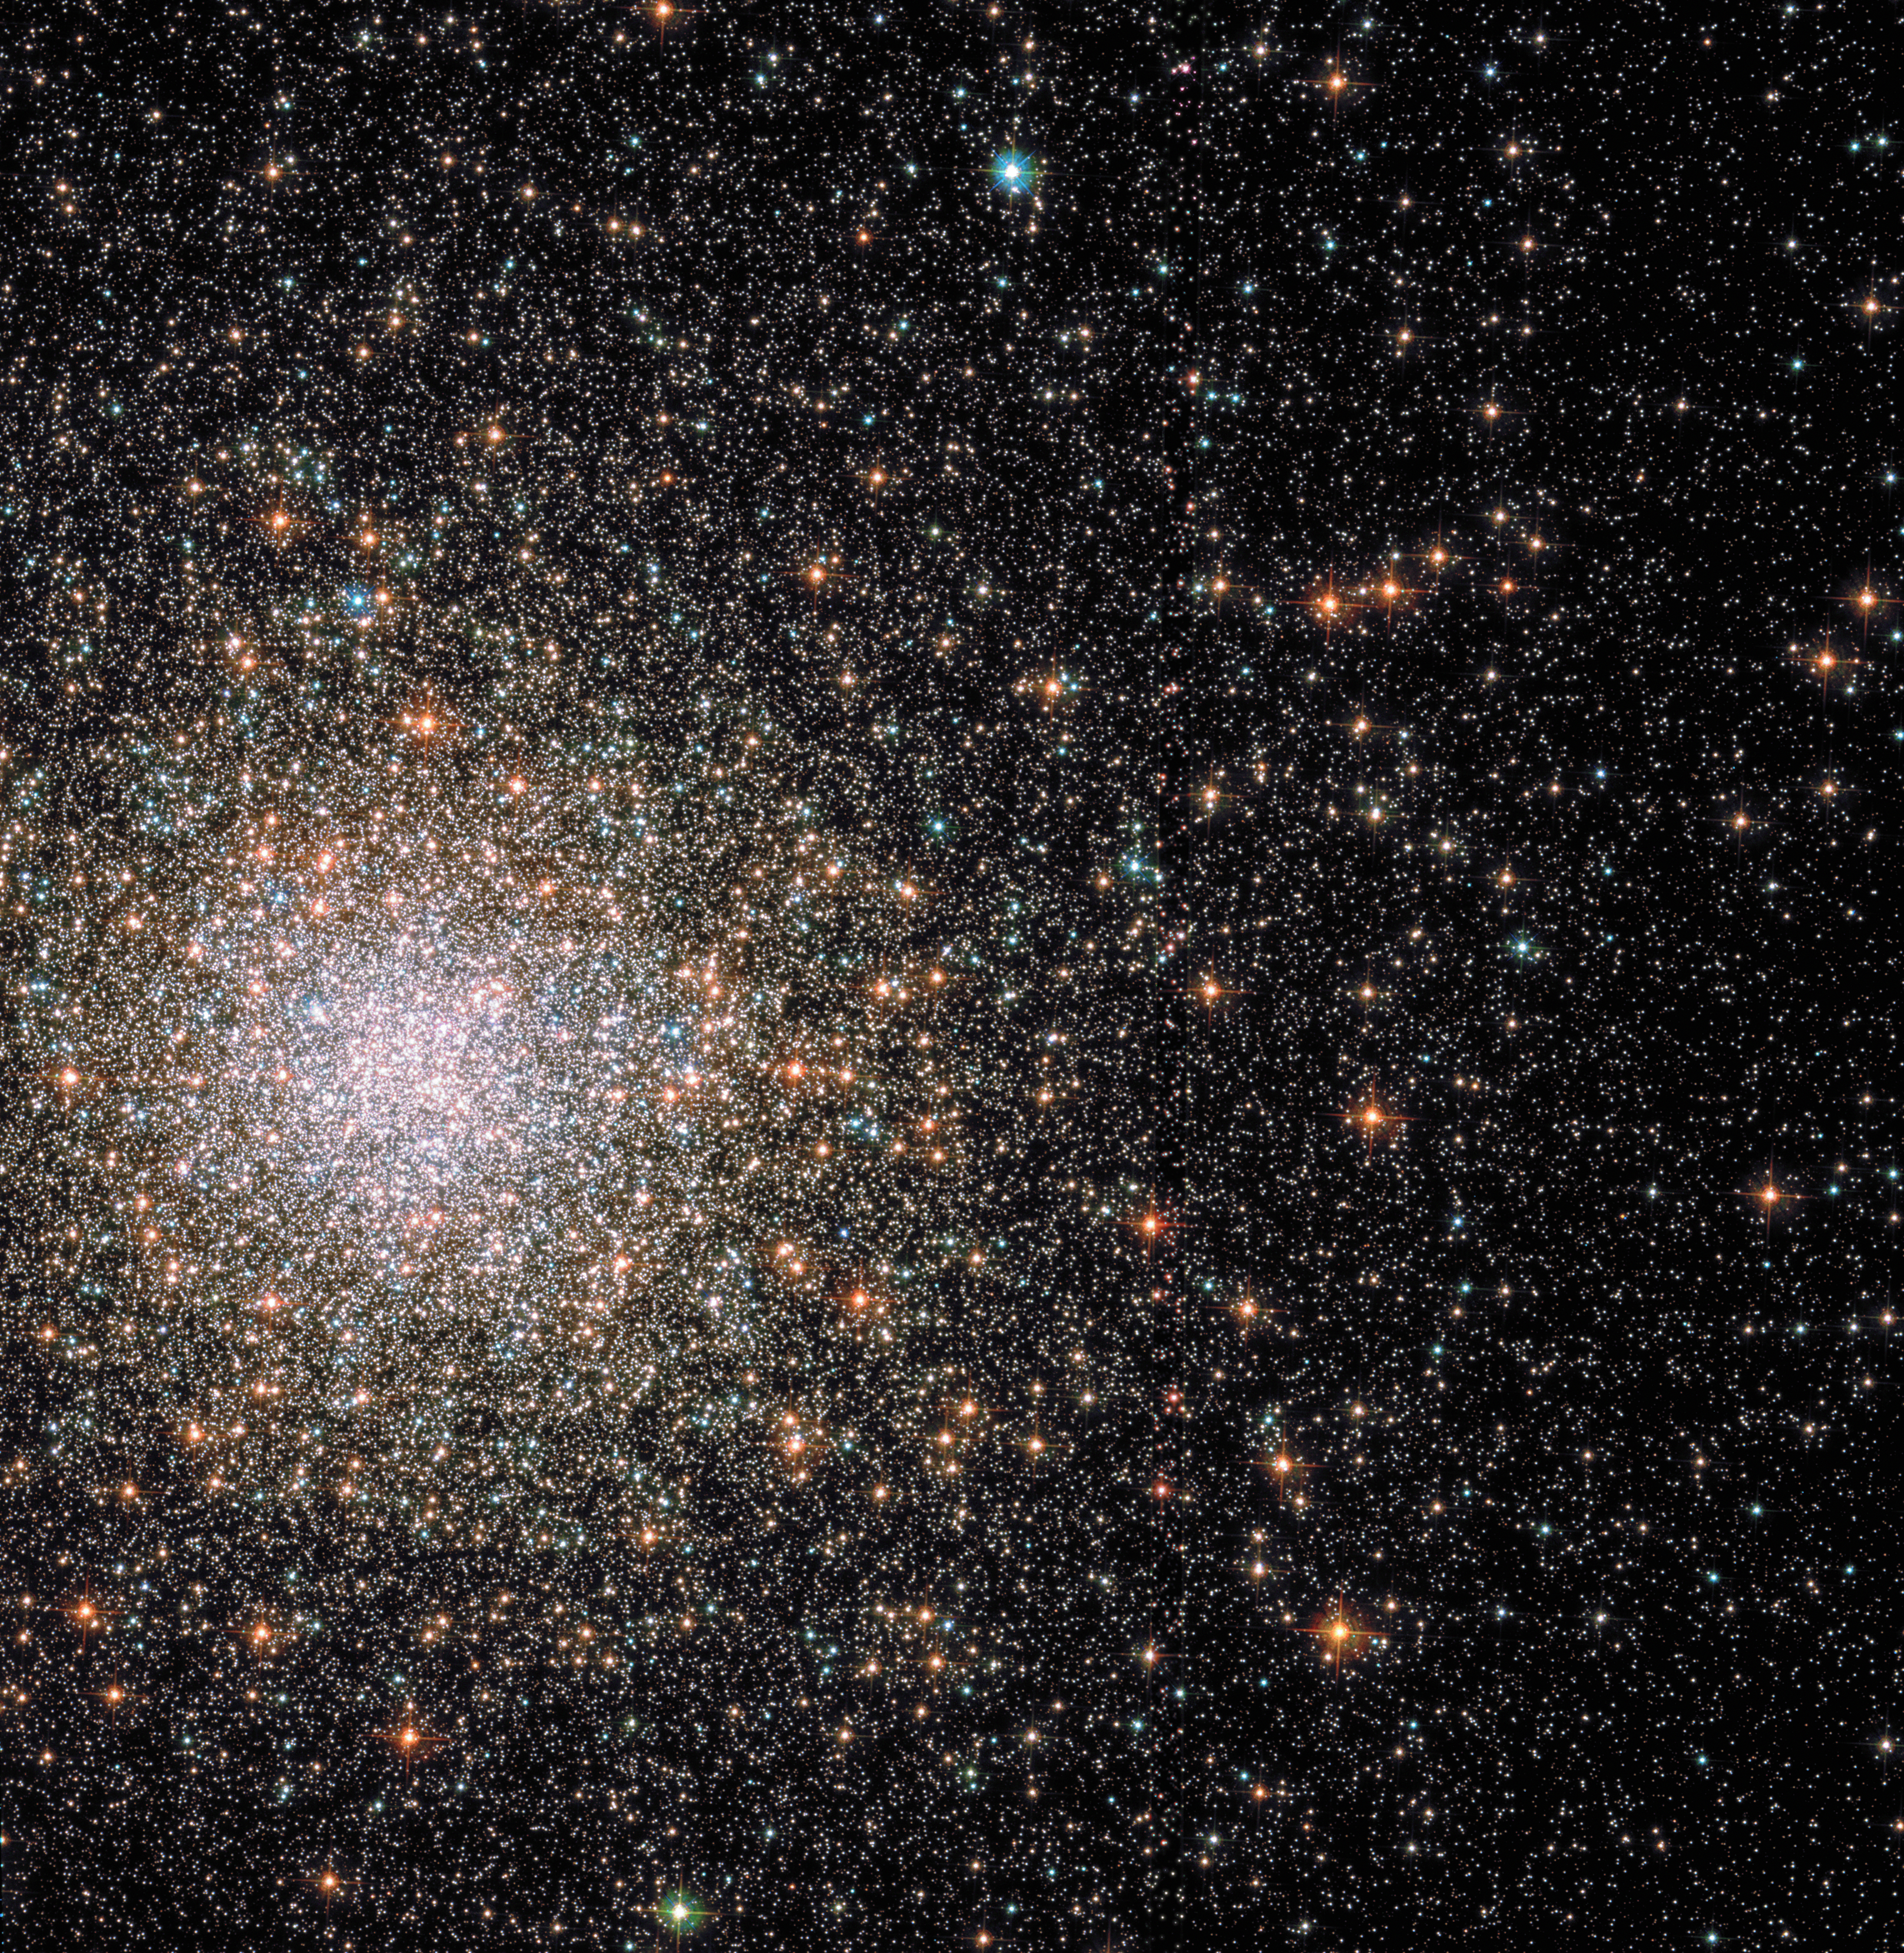

Comet or cluster?

Most globular clusters are almost perfectly spherical collections of stars — but Messier 62 breaks the mould. The 12-billion-year-old cluster is distorted, and stretches out on one side to form a comet-like shape with a bright head and extended tail. As one of the closest globular clusters to the centre of our galaxy, Messier 62 is likely affected by strong tidal forces that displace many of its stars, resulting in this unusual shape.

When globular clusters form, they tend to be somewhat denser towards the centre. The more massive the cluster, the denser the centre is likely to be. With a mass with almost a million times that of the Sun, Messier 62 is one of the densest of them all. With so many stars at the centre, interactions and mergers occur regularly. Huge stars form and run out of fuel quickly, exploding violently and their remains collapse to form white dwarfs, neutron stars and even black holes!

For many years, it was believed that any black holes that form in a globular cluster would quickly be kicked out due to the violent interactions taking place there. However, in 2013, a black hole was discovered in Messier 62 — the first ever to be found in a Milky Way globular cluster, giving astronomers a whole new hunting ground for these mysterious objects.

This view comprises ultraviolet and visible light gathered by the NASA/ESA Hubble Space Telescope’s Advanced Camera for Surveys.

Credit: ESA/Hubble & NASA, S. Anderson et al.